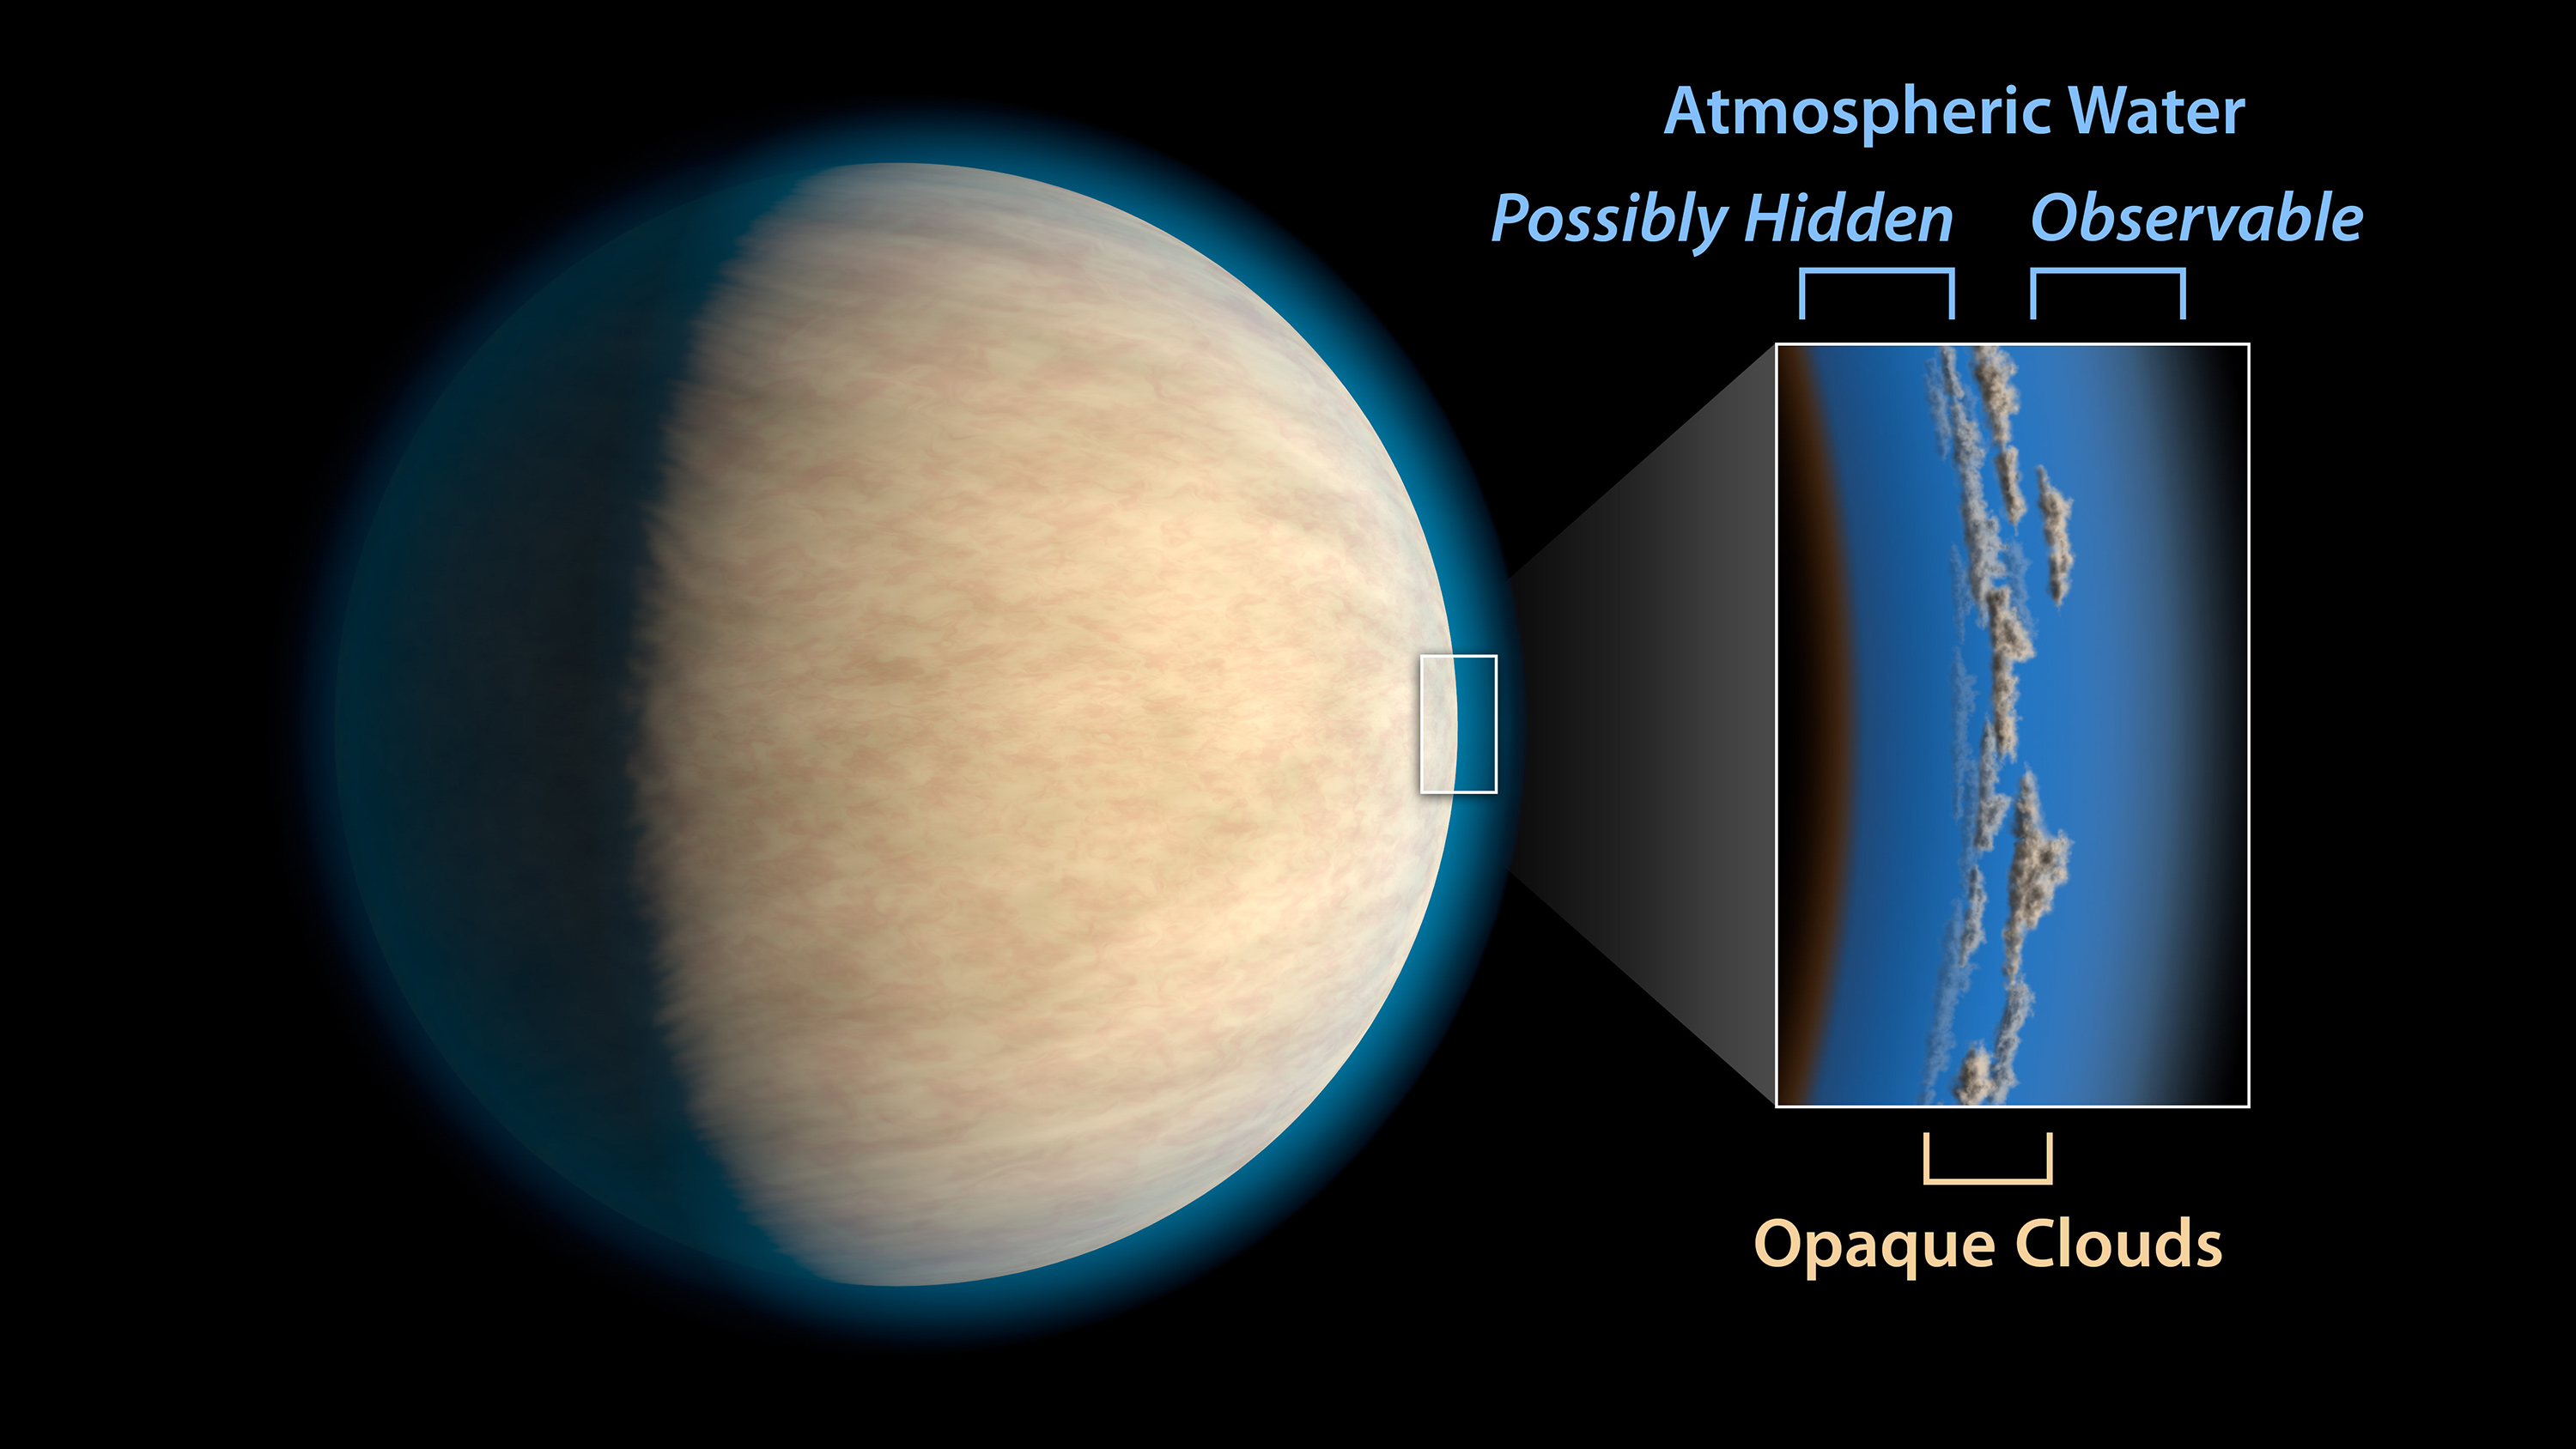

Hot Jupiter with Hidden Water - Artist's Impression

Hot Jupiters, exoplanets around the same size as Jupiter that orbit very closely to their stars, often have cloud or haze layers in their atmospheres. This may prevent space telescopes from detecting atmospheric water that lies beneath the clouds, according to a study in the Astrophysical Journal.

As much as half of the water in the atmospheres of these exoplanets may be blocked by these clouds or hazes, the research suggests. The study, led by researchers at NASA's Jet Propulsion Laboratory, Pasadena, California, examined hot Jupiters that had been observed with the NASA/ESA Hubble Space Telescope.

Credit: ESA / NASA and JPL-Caltech